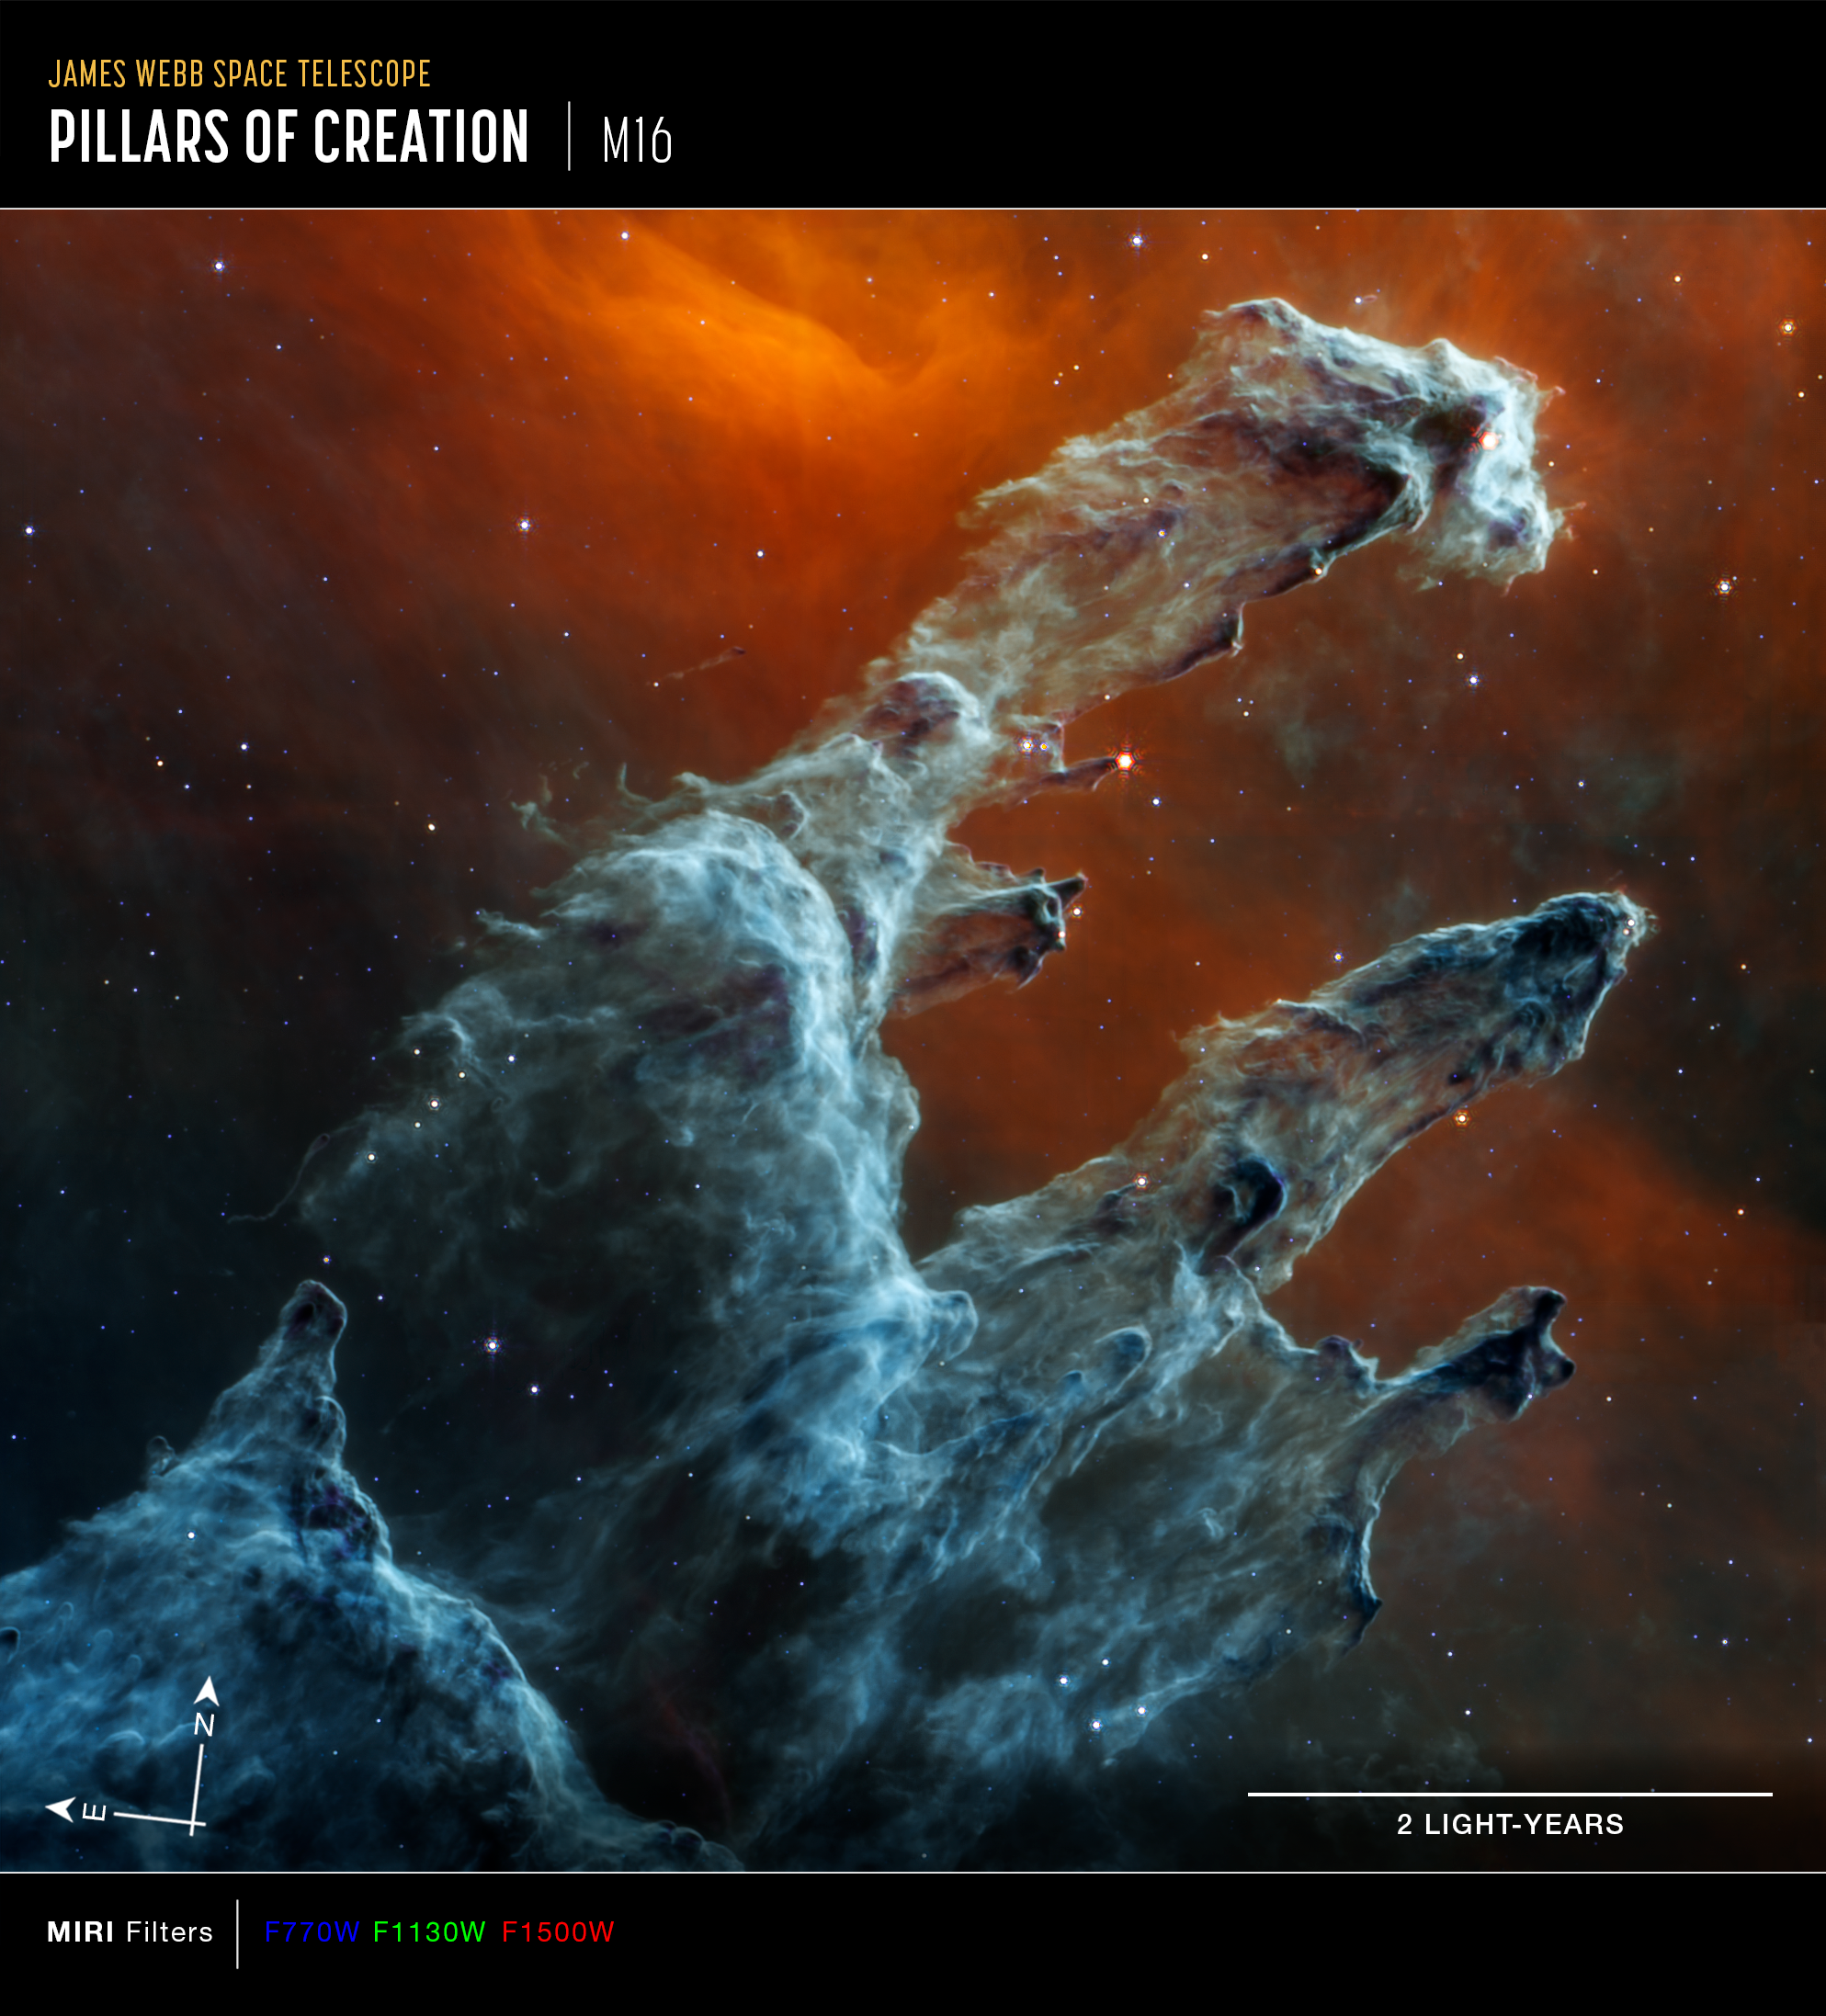

Pillars of Creation (MIRI Image - Annotated)

This image of the Pillars of Creation, captured by Webb’s Mid-Infrared Instrument (MIRI), shows compass arrows, a scale bar, and a colour key for reference. The Pillars of Creation lie within the Eagle Nebula, which is also known as Messier 16 (M16).

The north and east compass arrows show the orientation of the image on the sky. Note that the relationship between north and east on the sky (as seen from below) is flipped relative to the direction arrows on a map of the ground (as seen from above).

The scale bar is labelled in light-years, which is the distance that light travels in one Earth-year. (It takes 2 years for light to travel a distance equal to the length of the scale bar.) One light-year is equal to about 9.46 trillion kilometres. The field of view shown in this image is approximately 7 light-years across.

This image shows invisible mid-infrared wavelengths of light that have been translated into visible-light colours. The colour key shows which MIRI filters were used when collecting the light. The colour of each filter name is the visible light colour used to represent the infrared light that passes through that filter.

MIRI was contributed by ESA and NASA, with the instrument designed and built by a consortium of nationally funded European Institutes (The MIRI European Consortium) in partnership with JPL and the University of Arizona.

Credit: NASA, ESA, CSA, STScI; J. DePasquale (STScI), A. Pagan (STScI)